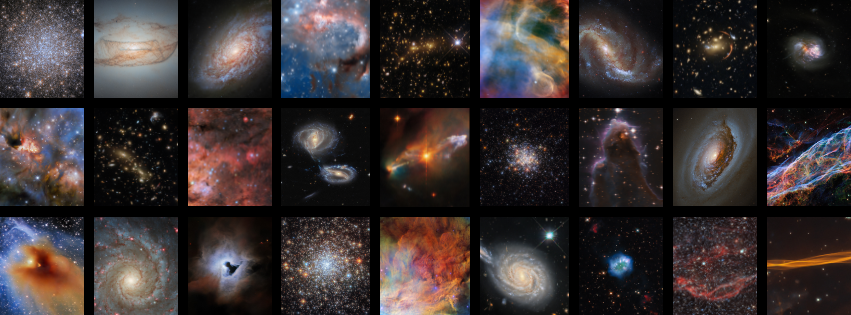

Fifteen years of the ESA/Hubble Picture of the Week series

April 2025 will mark fifteen years of the ESA/Hubble science outreach team publishing a new image every Monday from the NASA/ESA Hubble Space Telescope. The Picture of the Week series has become a flagship product for the ESA/Hubble programme throughout the years, now totalling nearly 800 individual images.

Credit: ESA/Hubble